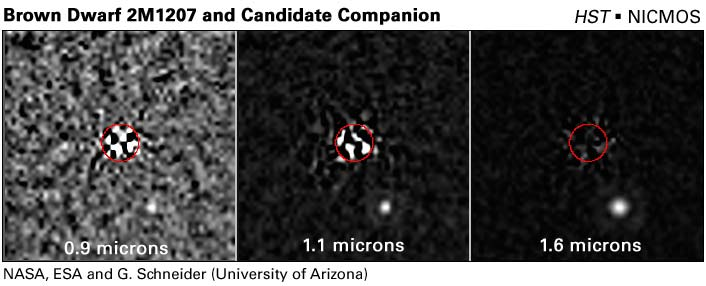

Three separate Hubble views of extrasolar planet candidate

These are Hubble Near Infrared Camera and Multi-Object Spectrometer (NICMOS) Camera 1 images of 2M1207's giant planetary companion candidate at three increasingly longer near-infrared wavelengths [left to right: 0.9, 1.1, and 1.6 microns]. The light from 2M1207 itself has been greatly reduced by subtracting a second image of the star taken with Hubble rolled to a different orientation in the sky. Imperfections in the "differential roll" subtraction technique give rise to optical artifacts at the location of 2M1207, which is centred in the red circle of 0.2 arc-second radius. The giant planetary companion candidate is the white disk located outside and to the lower right of the red circle. 2M1207, a young brown dwarf of spectral type M8.5, is itself quite red - 11 times fainter at 0.9 microns than it is at 1.6 microns. The giant planetary companion candidate at 0.9 microns is significantly redder in comparison, 44 times fainter at 0.9 microns than it is at 1.6 microns where, at that shorter wavelength, it is also 720 times fainter than 2M1207.

Credit: NASA, ESA, G. Schneider (Steward Observatory, Univ. of Arizona, USA), I. Song (Gemini Observ.), B. Zuckerman, E. Becklin (Univ. of California, USA), P. Lowrance (California Inst. of Technology, USA), B. Macintosh (Lawrence Livermore National Laboratory, USA), M. Bessell (Australian National Univ.), and C. Dumas and G. Chauvin (European Southern Observatory)